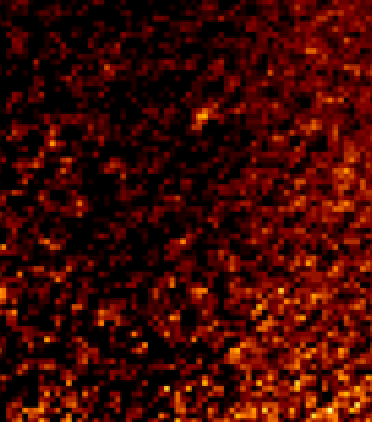

Fomalhaut b in 2012

Fomalhaut b in 2012.

Credit: NASA, ESA and P. Kalas (University of California, Berkeley, USA)